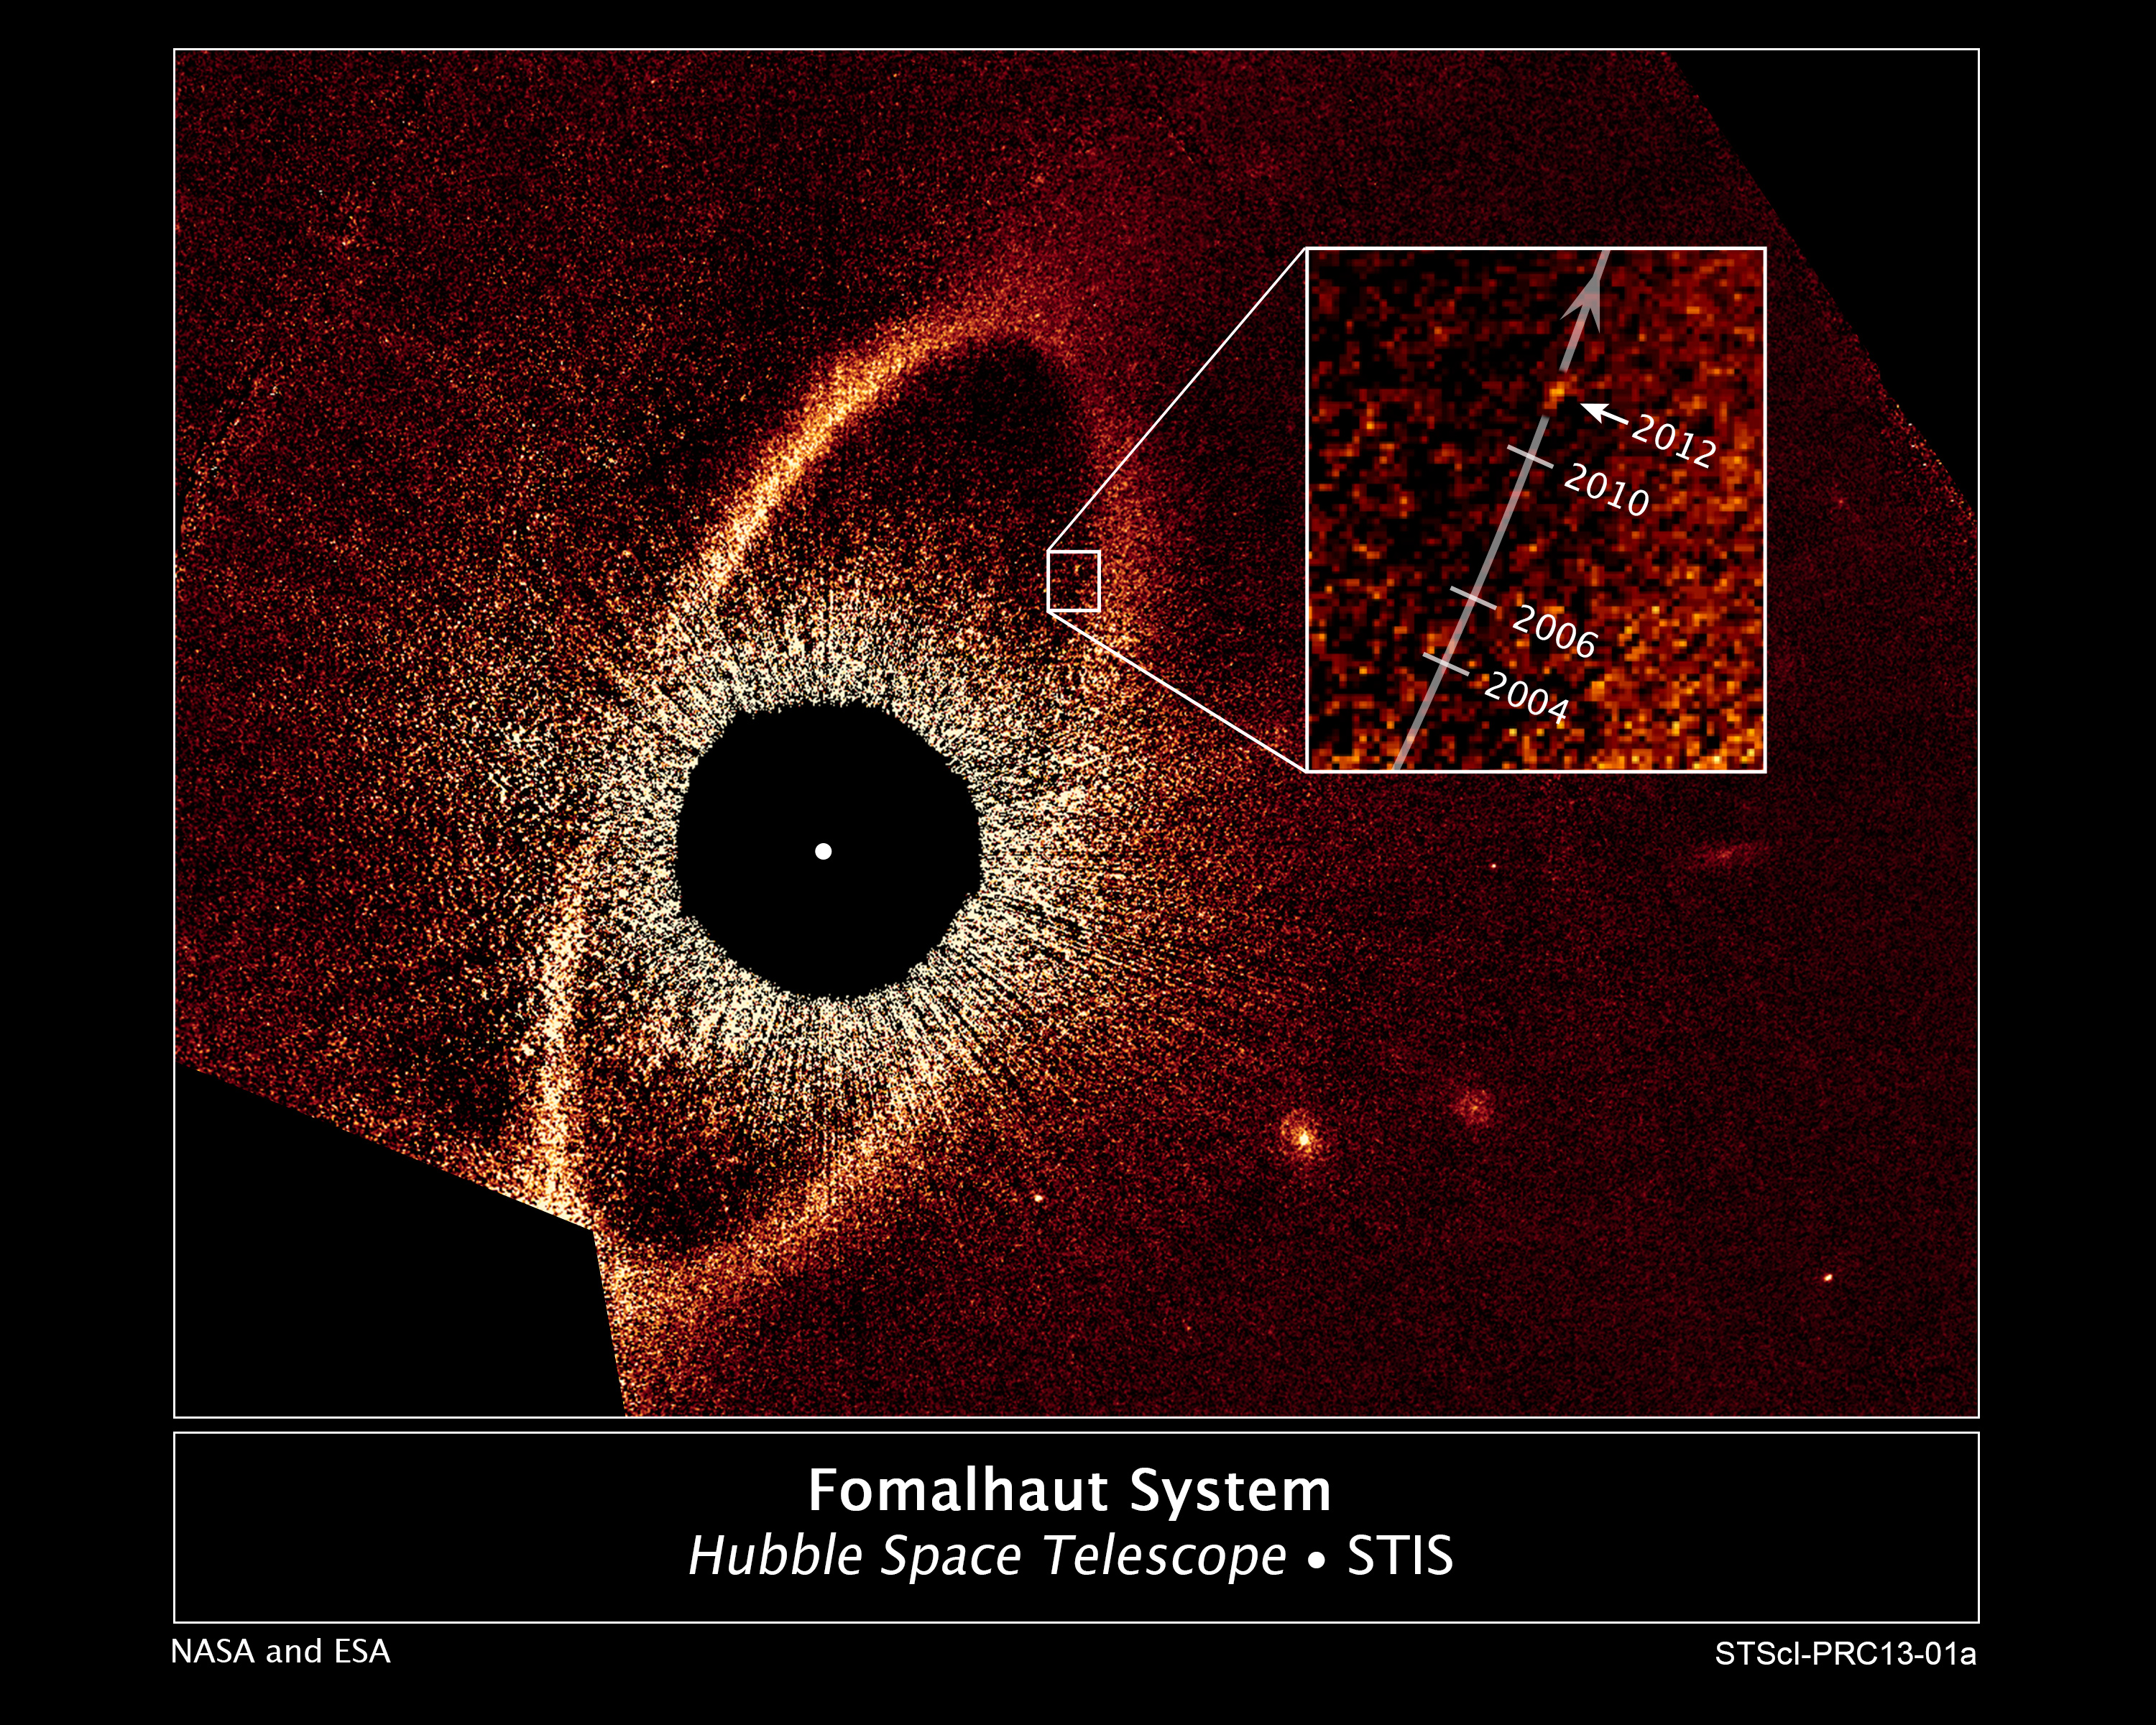

Rogue planetary orbit for Fomalhaut b

This false-colour composite image, taken with the Hubble Space Telescope, reveals the orbital motion of the planet Fomalhaut b. Based on these observations, astronomers calculated that the planet is in a 2000-year-long, highly elliptical orbit. The planet will appear to cross a vast belt of debris around the star roughly 20 years from now. If the planet's orbit lies in the same plane with the belt, icy and rocky debris in the belt could crash into the planet's atmosphere and produce various phenomena. The black circle at the centre of the image blocks out the light from the bright star, allowing reflected light from the belt and planet to be photographed. The Hubble images were taken with the Space Telescope Imaging Spectrograph in 2010 and 2012.

Credit: NASA, ESA and P. Kalas (University of California, Berkeley and SETI Institute)